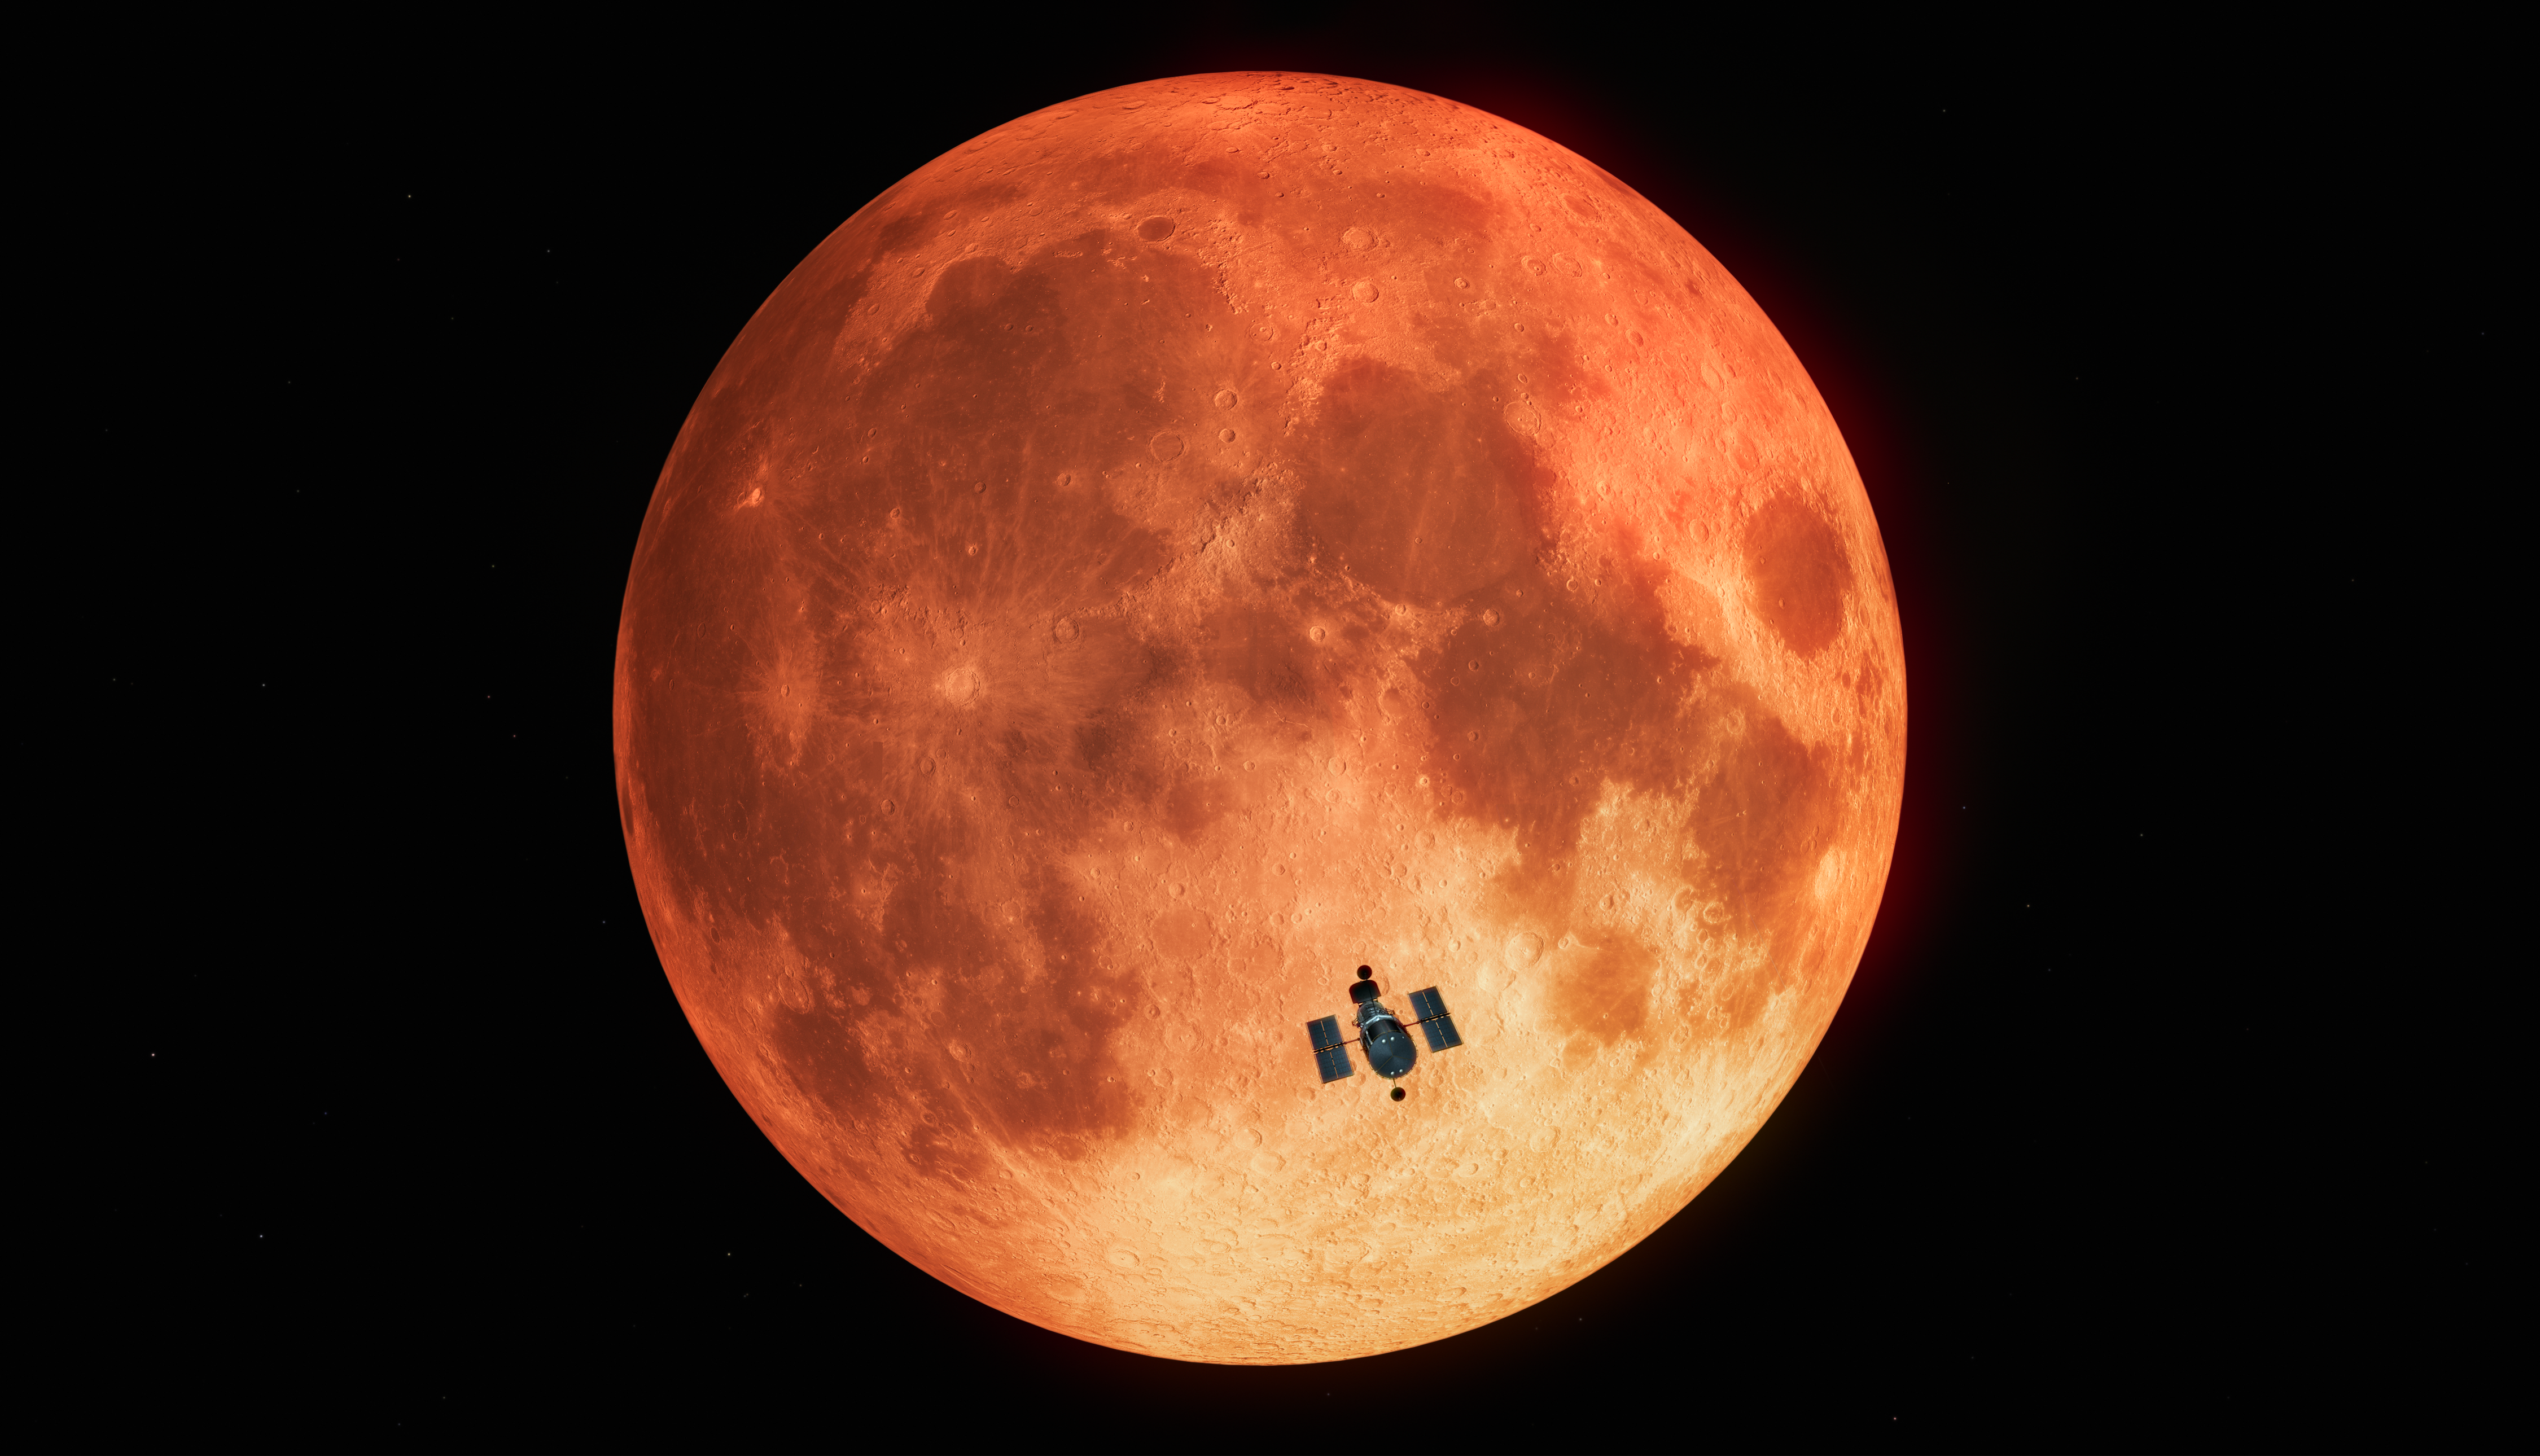

Hubble Observes the Total Lunar Eclipse (Artist’s Impression)

Taking advantage of a total lunar eclipse in January 2019, astronomers using the NASA/ESA Hubble Space Telescope have measured the amount of ozone in Earth’s atmosphere. This method serves as a proxy for how they will observe Earth-like planets transiting in front of other stars in search of life.

Our planet’s perfect alignment with the Sun and Moon during a total lunar eclipse mimics the geometry of a transiting terrestrial planet with its star. In a new study, Hubble did not look at Earth directly. Instead, astronomers used the Moon as a mirror that reflects the sunlight transmitted through Earth’s atmosphere which was then captured by Hubble.

This is the first time ultraviolet light passing through Earth’s atmosphere was observed from space and the first time a total lunar eclipse was captured from a space telescope.

Credit: ESA/Hubble, M. Kornmesser